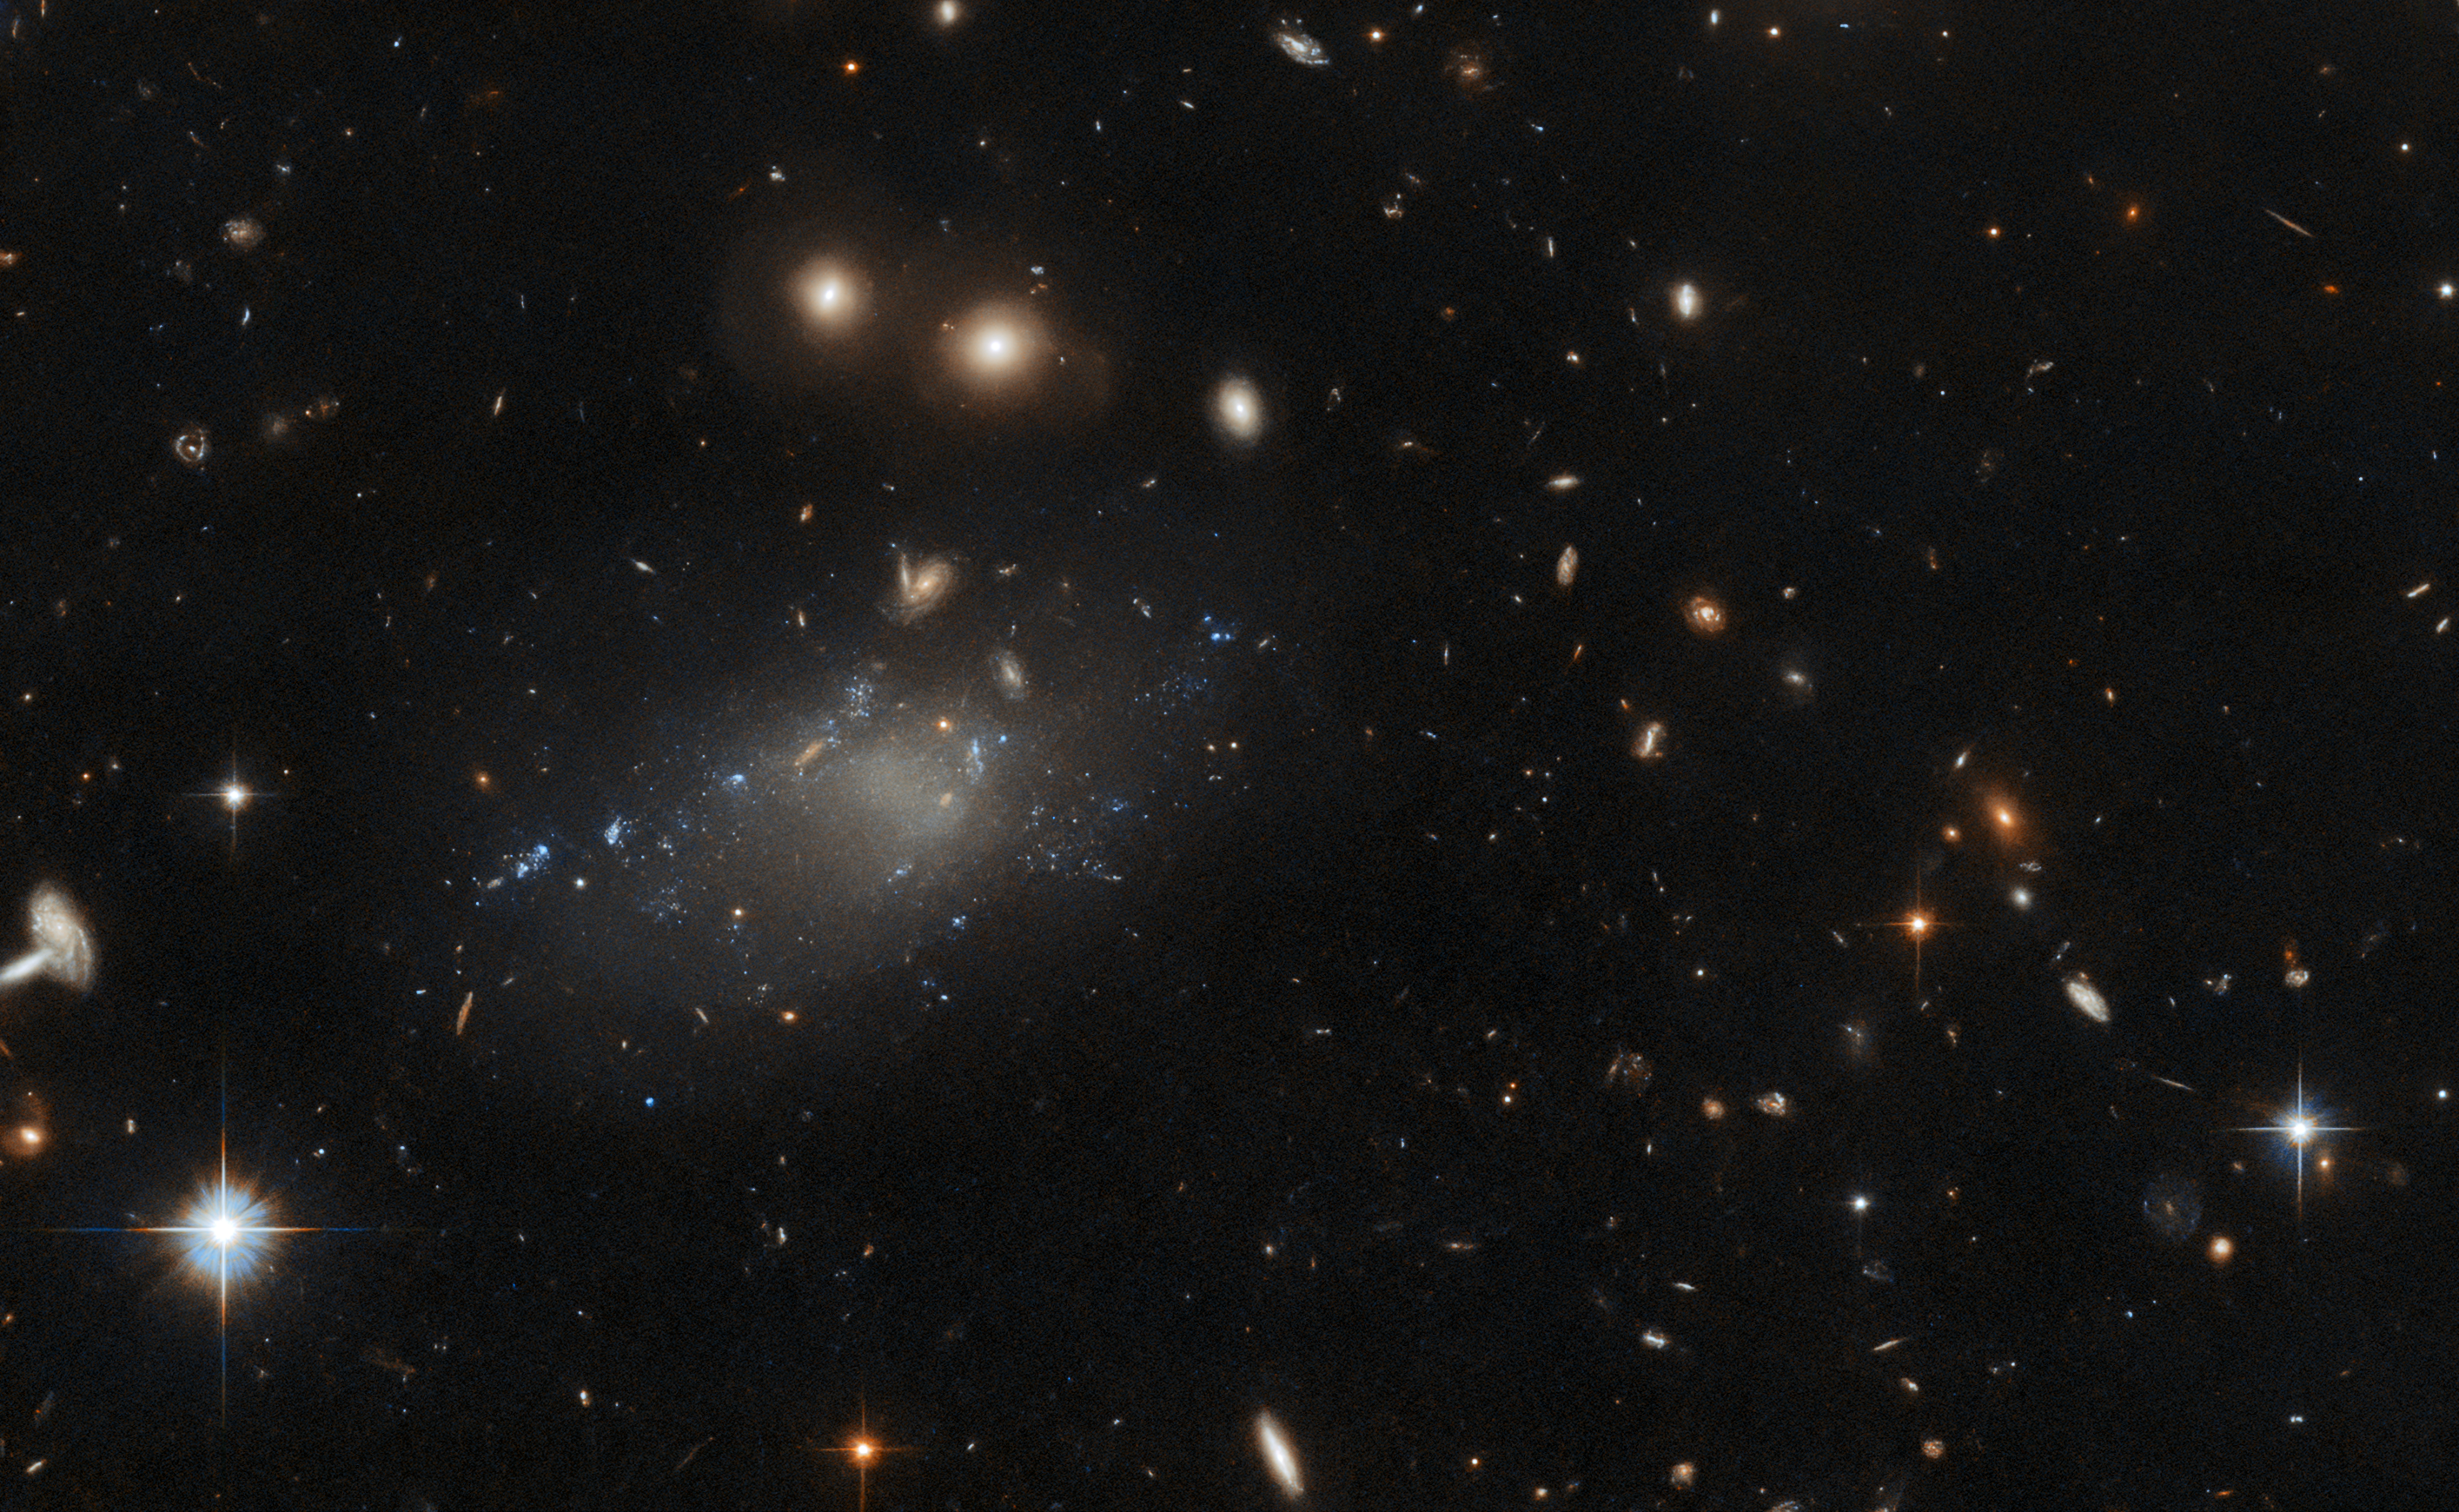

Hubble Spies a Tenuous Diffuse Galaxy

The ultra-diffuse galaxy GAMA 526784 appears as a tenuous patch of light in this image from the NASA/ESA Hubble Space Telescope. This wispy object resides in the constellation Hydra, roughly four billion light-years from Earth. Ultra-diffuse galaxies such as GAMA 526784 have a number of peculiarities. For example, their dark matter content can be either extremely low or extremely high — ultra-diffuse galaxies have been observed with an almost complete lack of dark matter, whereas others consist of almost nothing but dark matter. Another oddity of this class of galaxies is their anomalous abundance of bright globular clusters, something not observed in other types of galaxies.

Hubble captured GAMA 526784 with the Advanced Camera for Surveys (ACS), which was installed in 2002 by astronauts during Hubble Servicing Mission 3B. Since then, the instrument has played a pivotal role in some of Hubble’s most impressive scientific results, including capturing the Hubble Ultra Deep Field. The ACS has also photographed Pluto in advance of the New Horizon mission, observed gargantuan gravitational lenses and found fully formed galaxies in the early Universe.

This image comes from a set of Hubble observations designed to shed light on the properties of ultra-diffuse galaxies. Hubble’s keen vision allowed astronomers to study GAMA 526784 in high resolution at ultraviolet wavelengths, helping to gauge the sizes and ages of the compact star-forming regions studding the galaxy.

Credit: ESA/Hubble & NASA, R. van der Burg Acknowledgement: L. Shatz